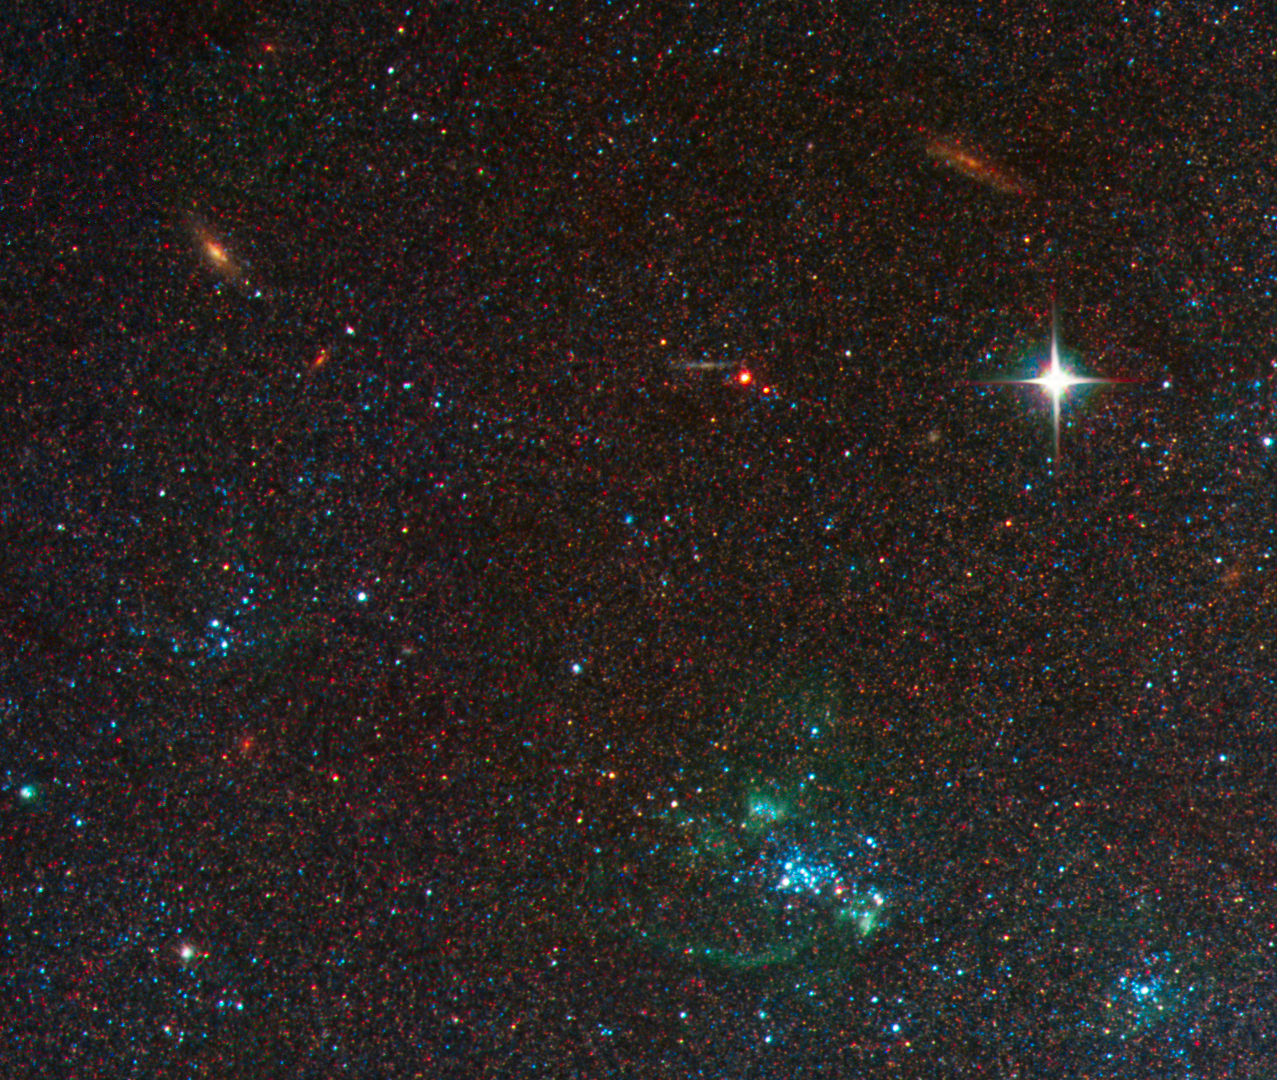

Spiral Galaxy M81 Details 5

HII shell of M81 and background galaxies.

Credit: NASA, ESA and the Hubble Heritage Team (STScI/AURA). Acknowledgment: A. Zezas and J. Huchra (Harvard-Smithsonian Center for Astrophysics)